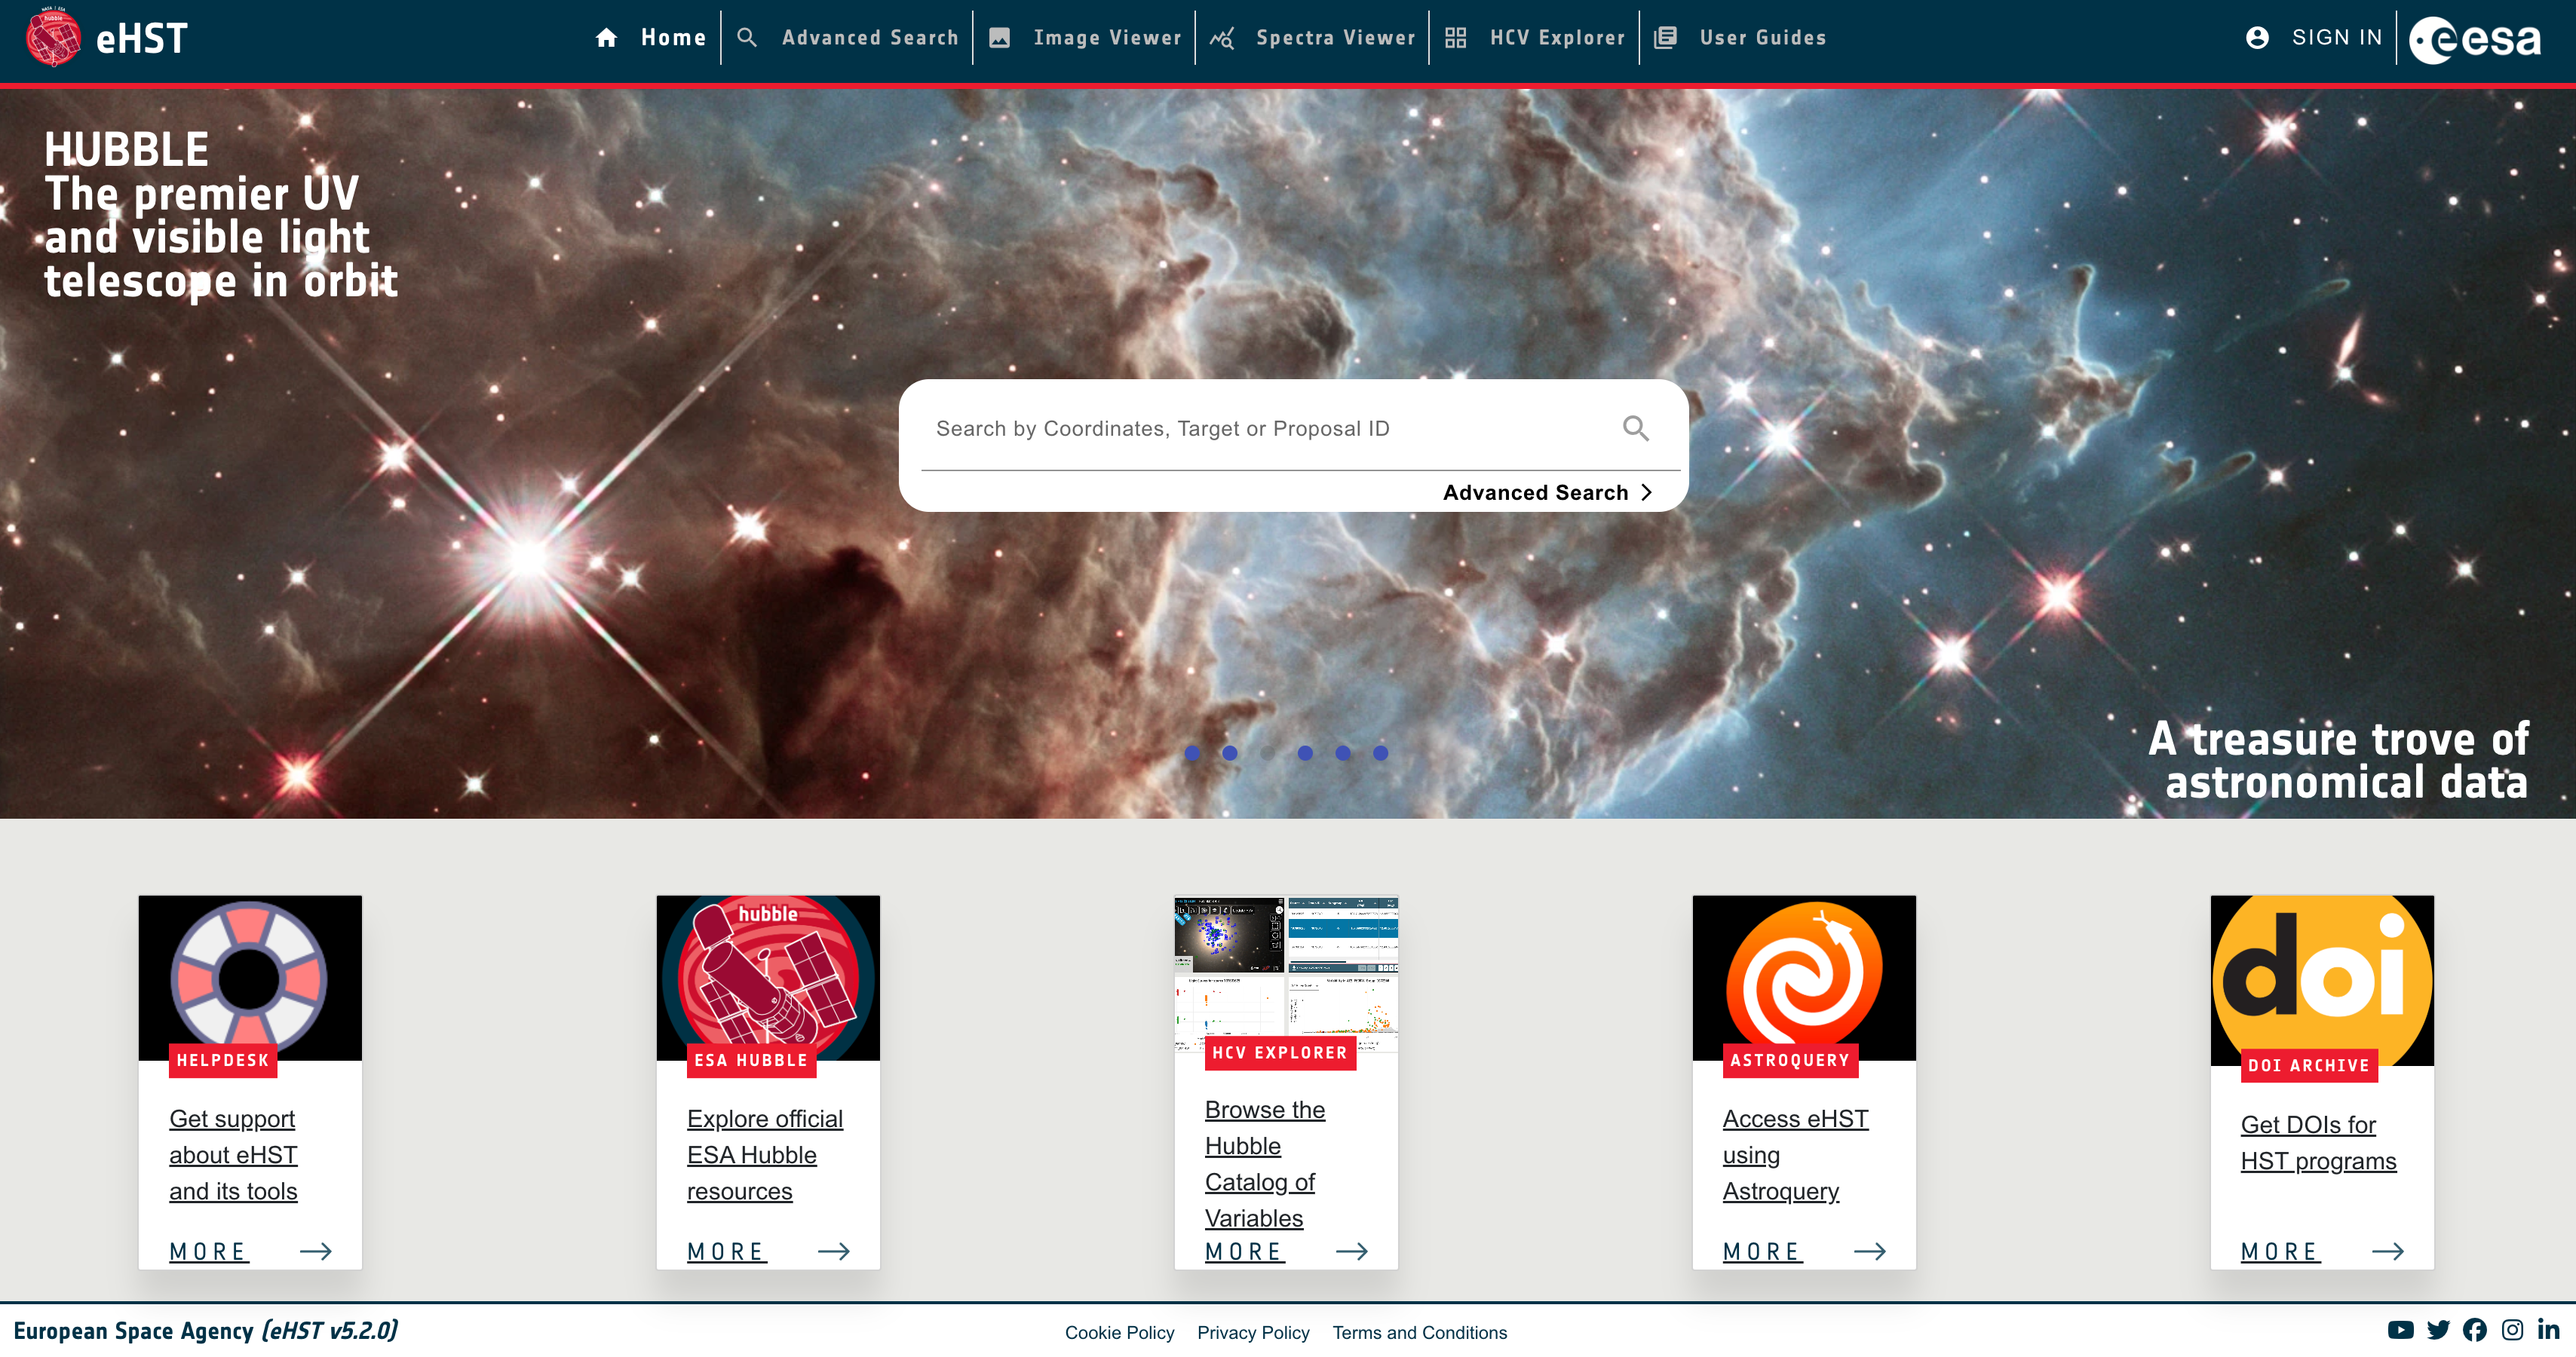

eHST User Interface.

This image shows the eHST user interface.

Credit: eHST